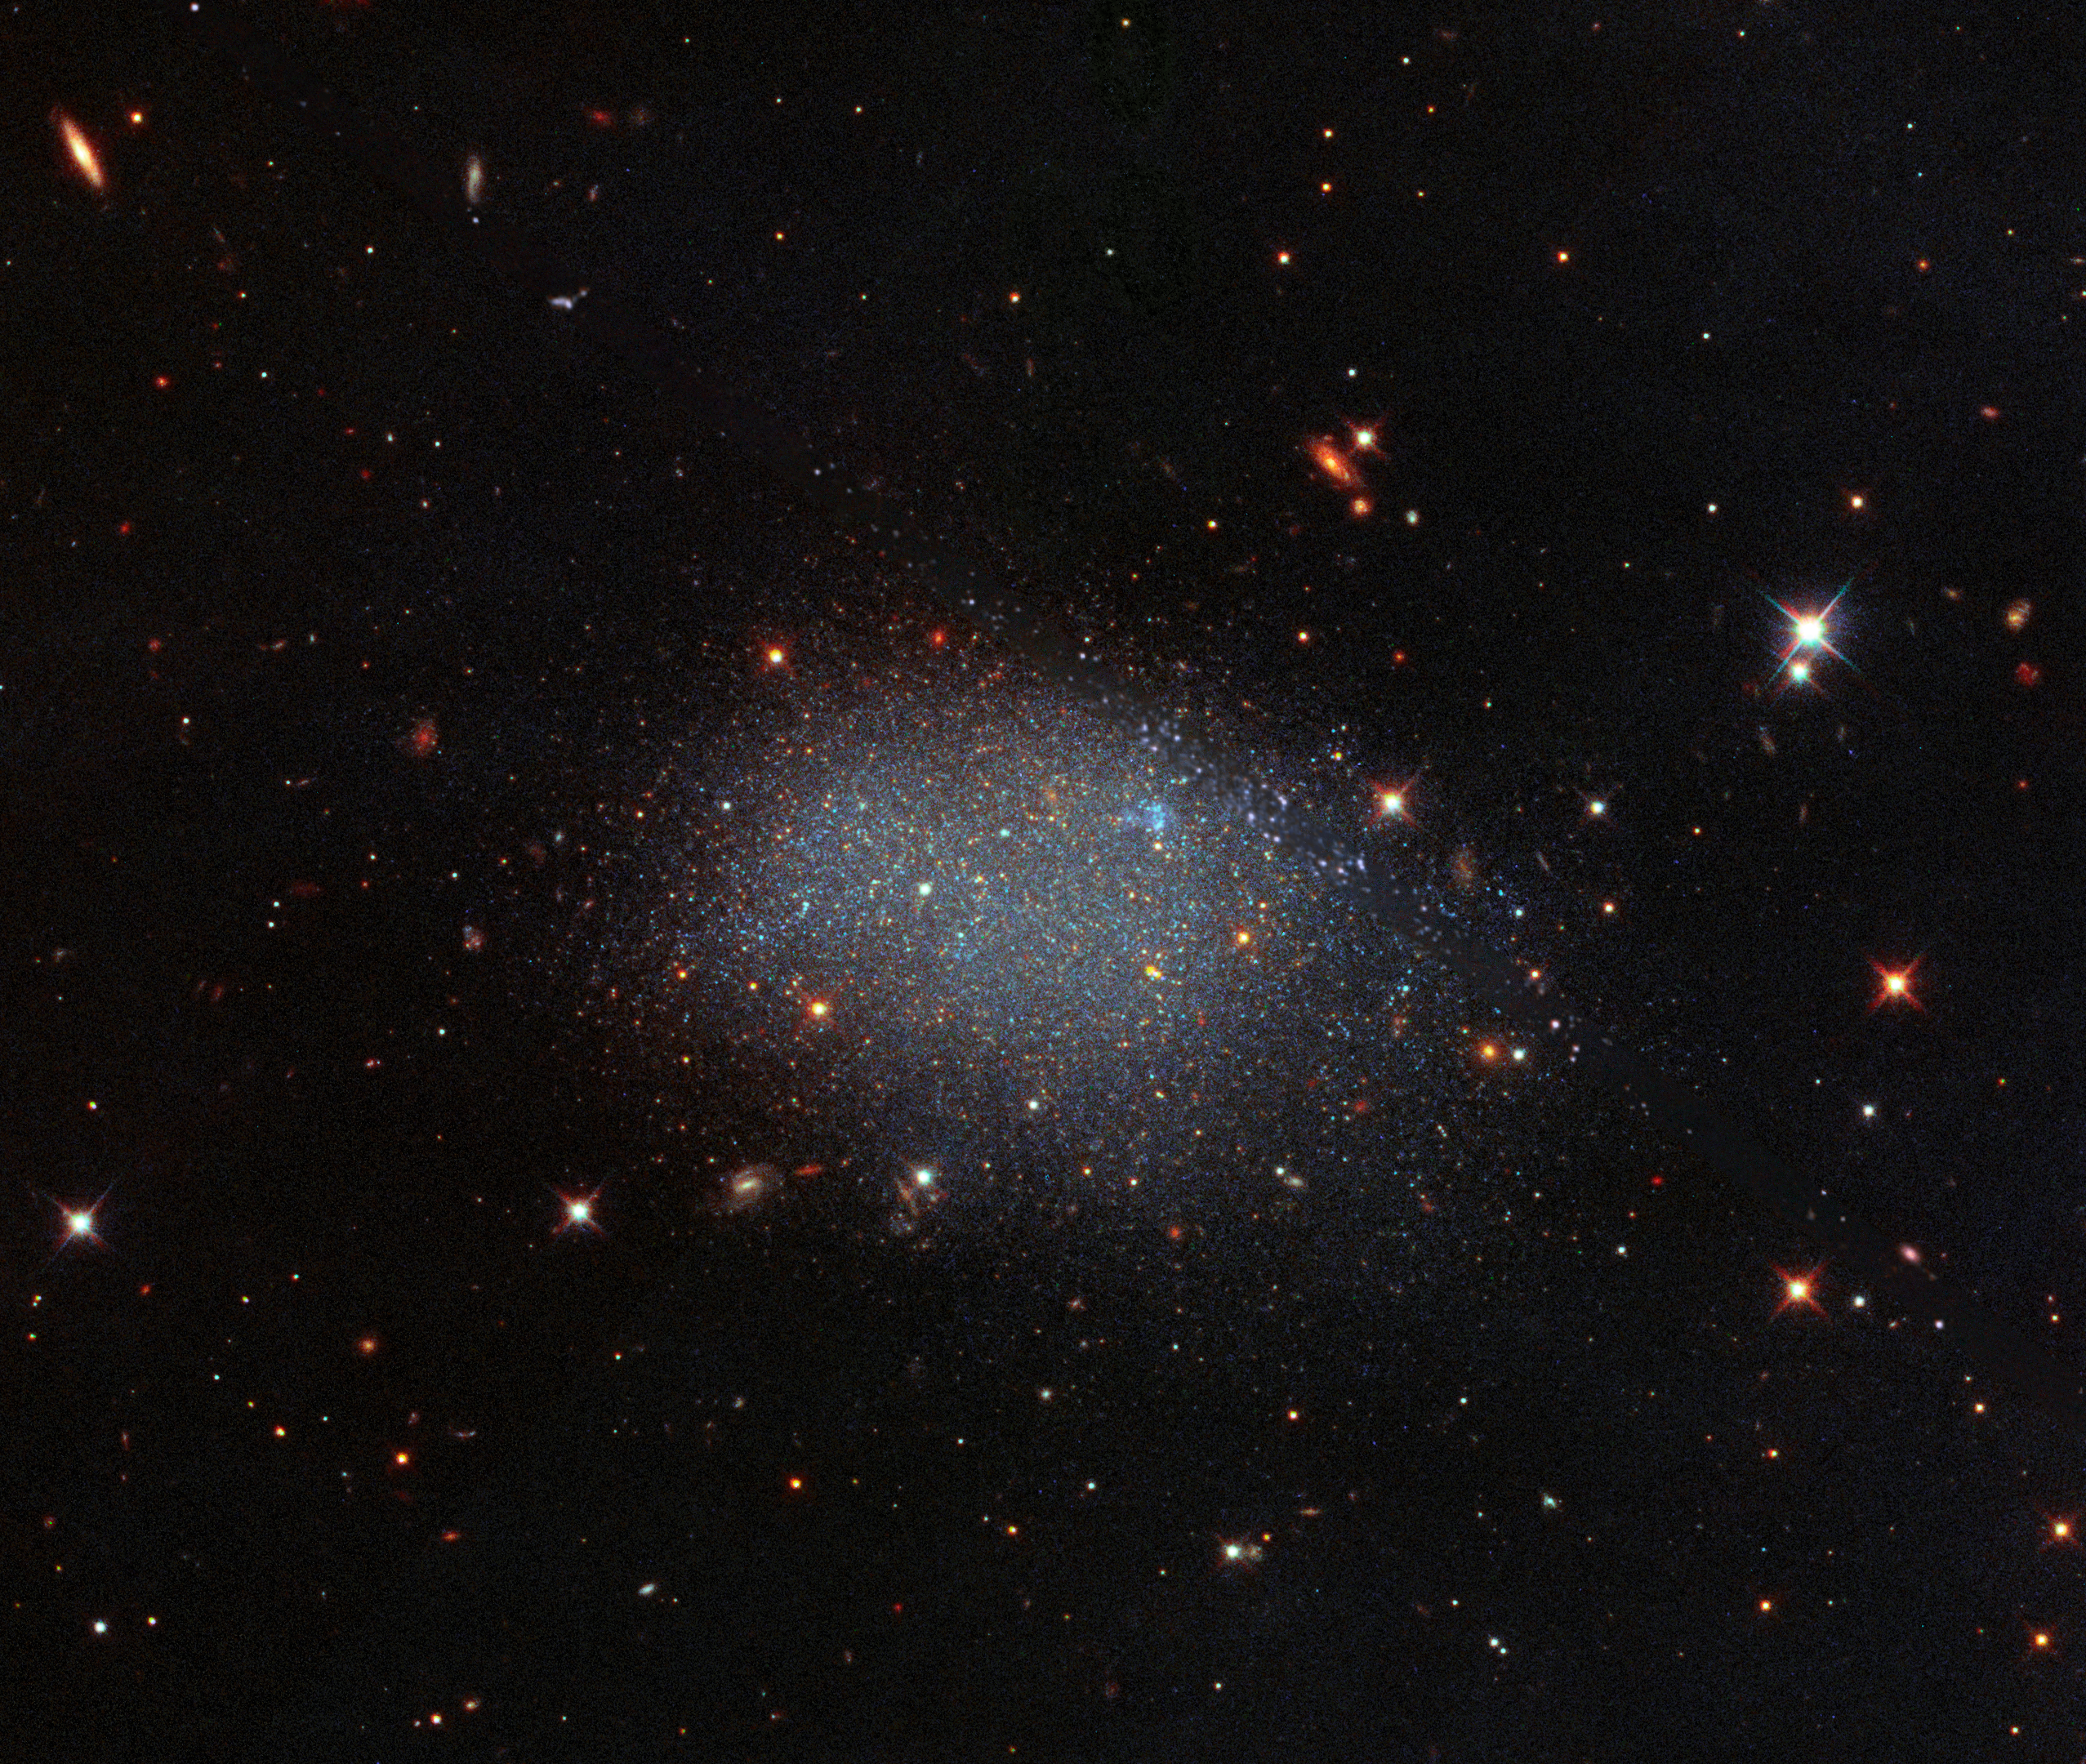

Stellar Glitter in a Field of Black

Unlike a spiral or elliptical galaxy, the galaxy KK 246 looks like glitter spilled across a black velvet sheet. KK 246, also known as ESO 461-036, is a dwarf irregular galaxy residing within the Local Void, a vast region of empty space. This lonely galaxy is the only one known for certain to reside in this enormous volume, along with 15 others that have been tentatively identified.

Although the picture appears to be full of galaxies, they are actually beyond this void, and instead form part of other galaxy groups or clusters. Cosmic voids, such as this one, are the spaces within the web-like structure of the Universe wherein very few or no galaxies exist.

Adjacent to the Local Group, this region of empty space is at least 150 million light-years across. For perspective, our own Milky Way galaxy is estimated to be 150 000 light-years across, making this void immense in its nothingness.

Credit: ESA/Hubble & NASA, E. Shaya, L. Rizzi, B. Tully, et al.